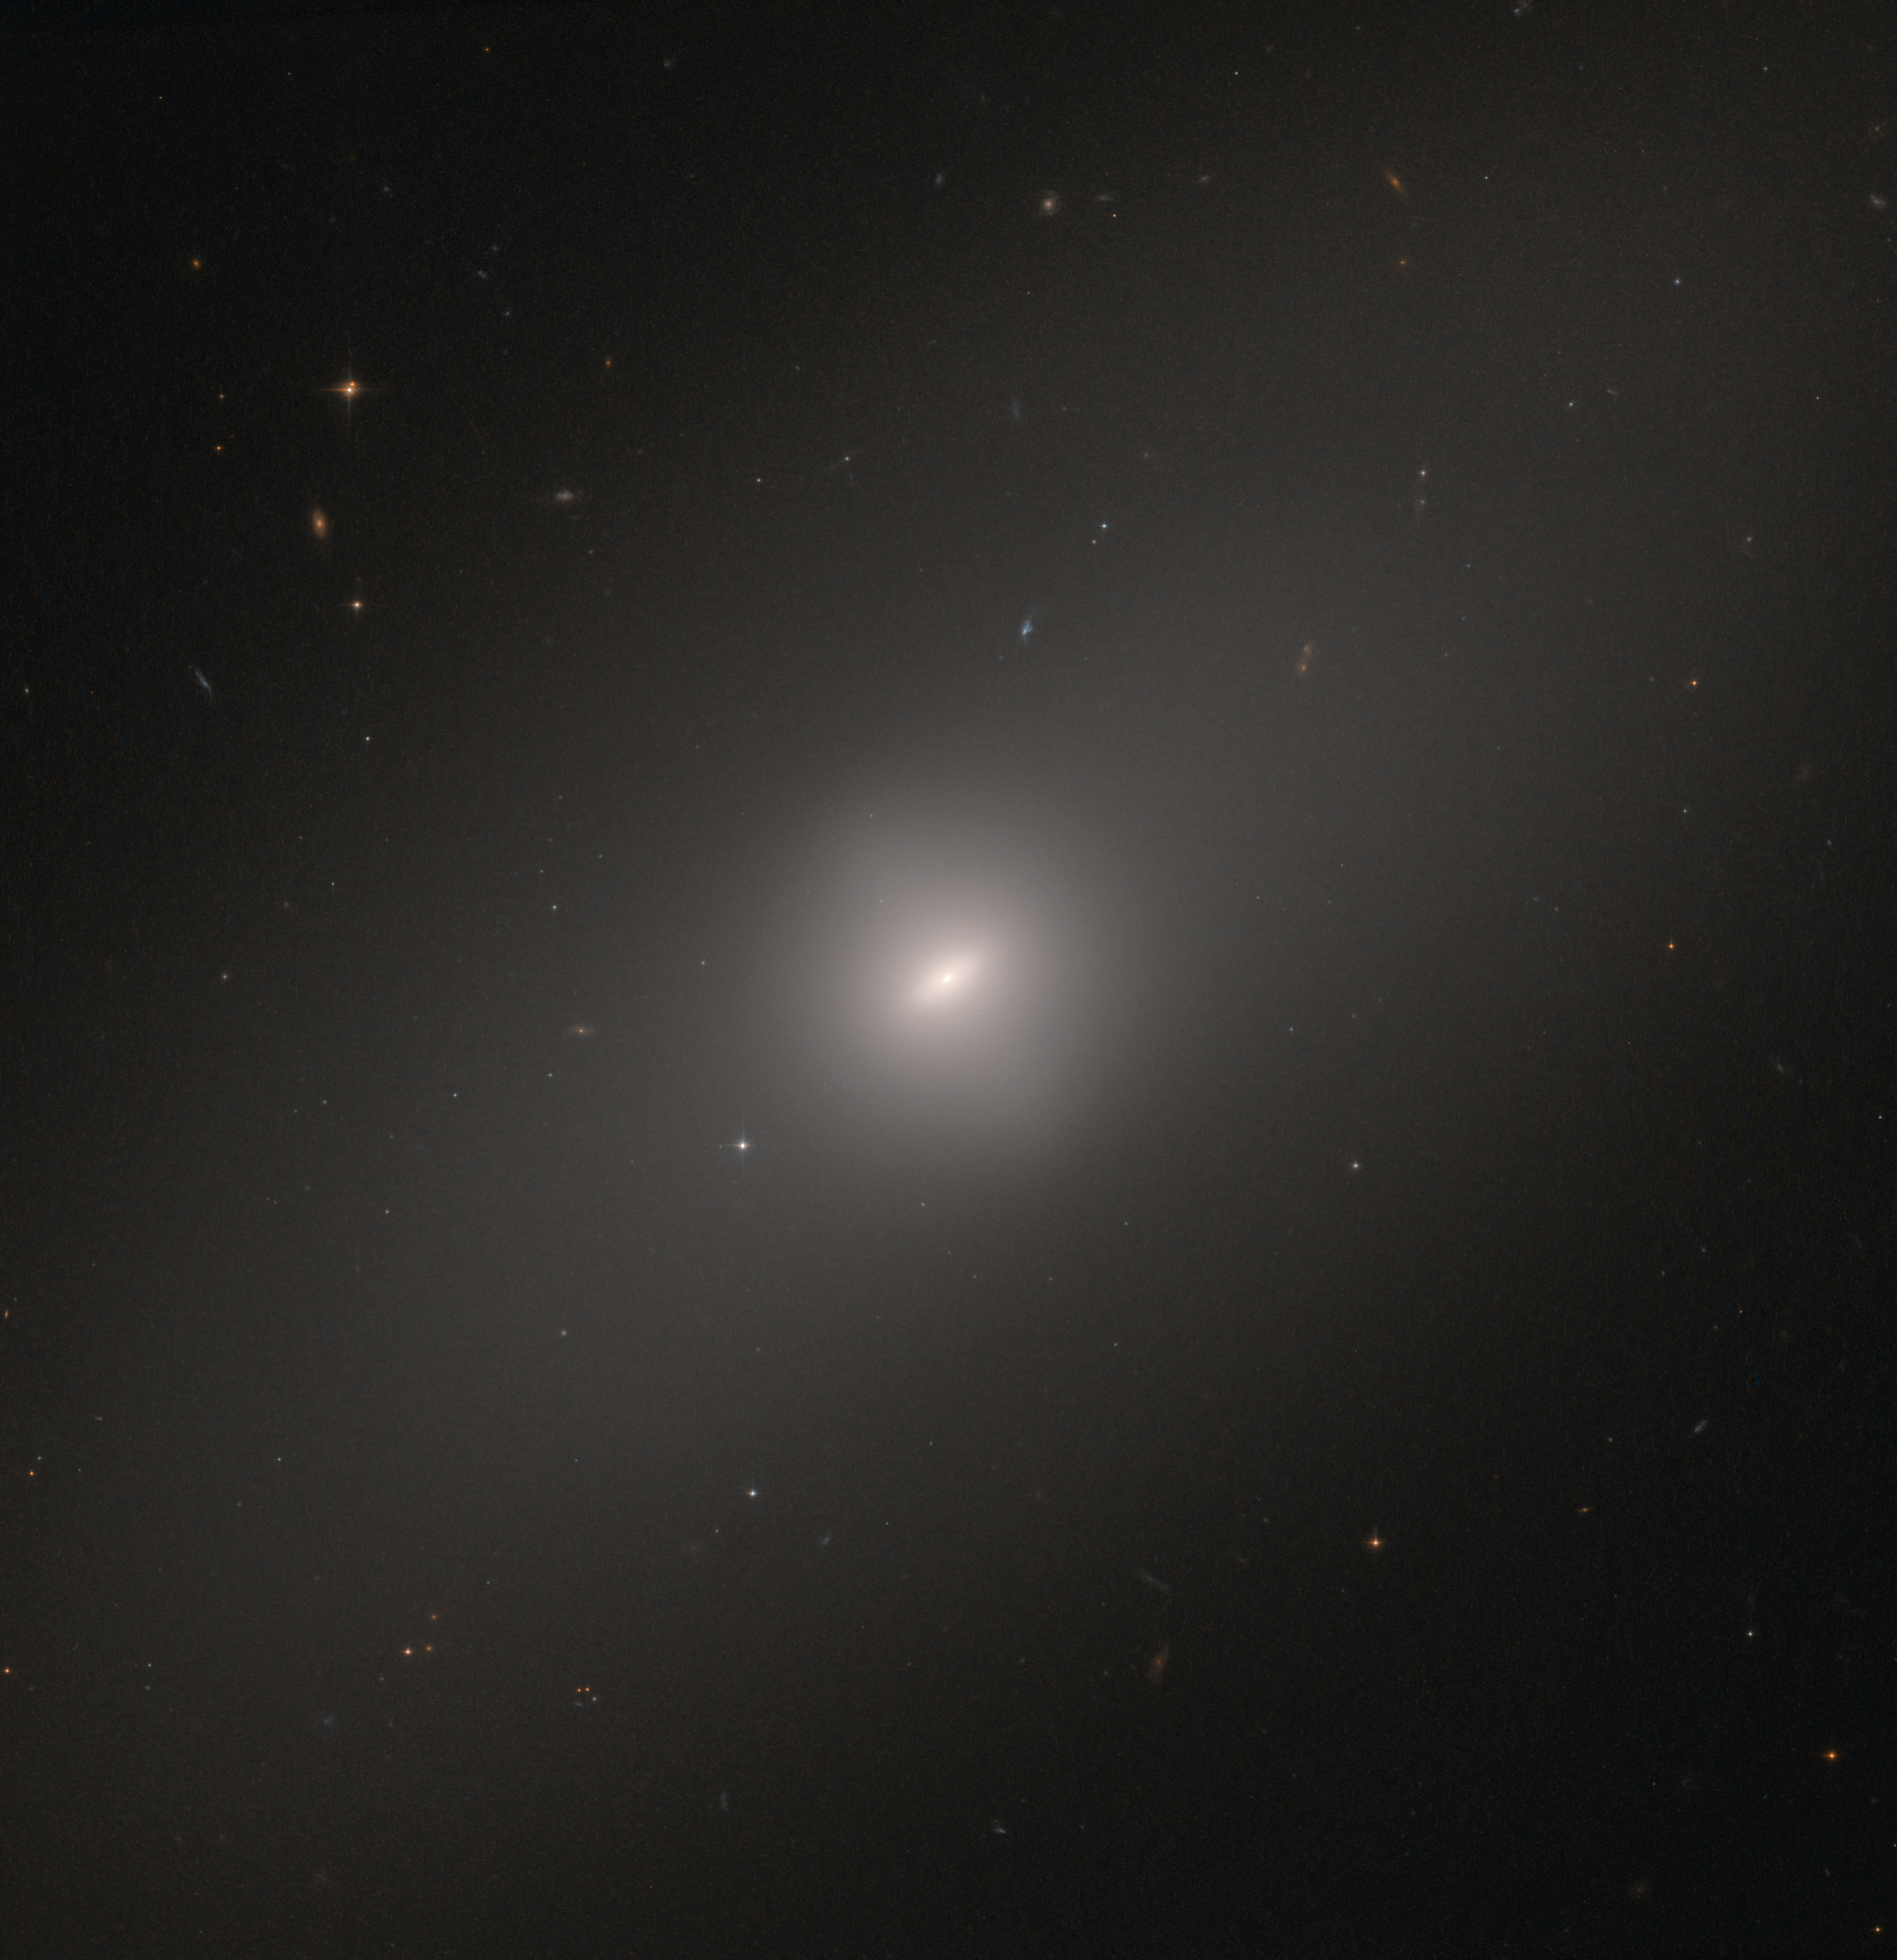

Settling into old age

NGC 3384, visible in this image, has many of the features characteristic of so-called elliptical galaxies. Such galaxies glow diffusely, are rounded in shape, display few visible features, and rarely show signs of recent star formation. Instead, they are dominated by old, ageing, and red-hued stars. This stands in contrast to the sprightliness of spiral galaxies such as our home galaxy, the Milky Way, which possess significant populations of young, blue stars in spiral arms swirling around a bright core.

However, NGC 3384 also displays a hint of disc-like structure towards its centre, in the form of a central ‘bar’ of stars cutting through its centre. Many spirals also boast such a bar, the Milky Way included; galactic bars are thought to funnel material through and around a galaxy’s core, helping to maintain and fuel the activities and processes occurring there.

NGC 3384 is located approximately 35 million light-years away in the constellation of Leo (The Lion). This image was taken using the NASA/ESA Hubble Space Telescope’s Advanced Camera for Surveys.

Credit: ESA/Hubble & NASA, B. Lehmer et al.